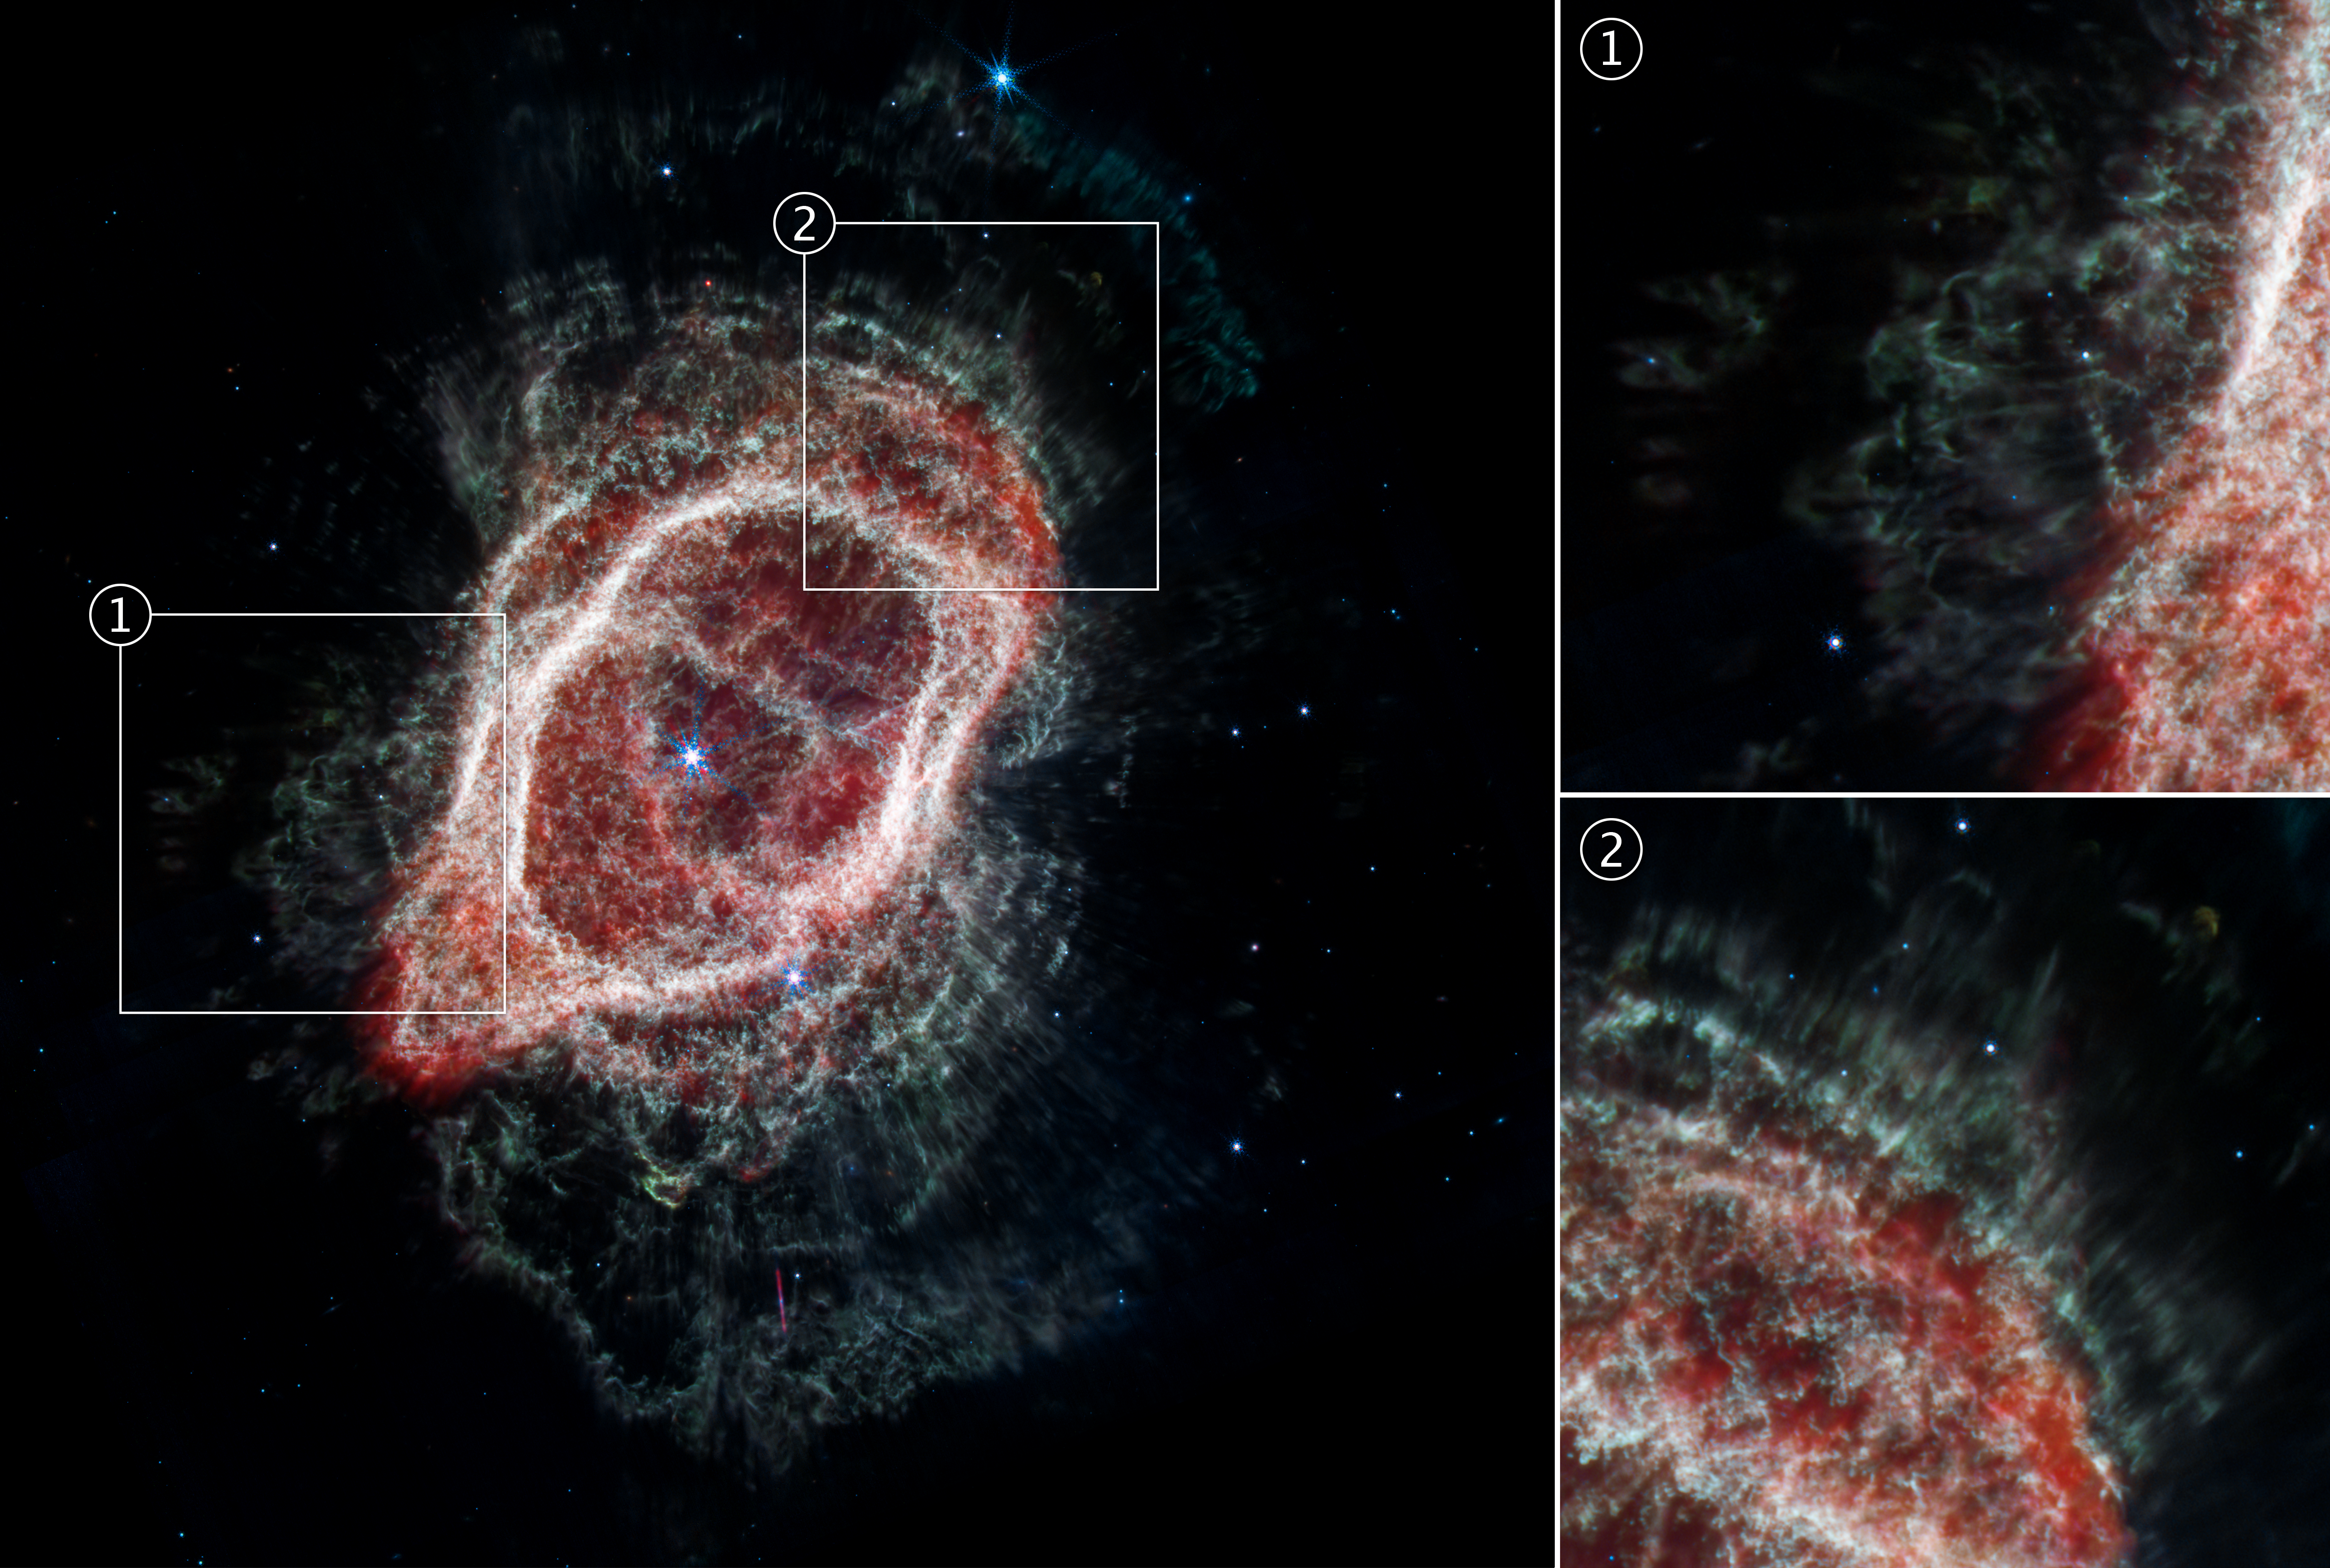

Southern Ring Nebula’s Spokes (NIRCam and MIRI Composite Image)

This is an image of the Southern Ring Nebula (NGC 3132), captured by the NASA/ESA/CSA James Webb Space Telescope’s Near-Infrared Camera (NIRCam) and Mid-Infrared Instrument (MIRI). The image combines near- and mid-infrared light from three filters.

Examine the straight, brightly-lit lines that pierce through the rings of gas and dust around the edges of the Southern Ring Nebula in the Webb Space Telescope’s image. These “spokes” appear to emanate from one or both of the central stars, marking where light streams through holes in the nebula. The holes are evidence of where the dimmer star that created this scene shot out material, creating open pathways for light to flow through.

Some of the star’s ejections followed thin, straight lines (second box) through the gas and dust. Other ejections (first box) look bent, curvy, and thicker. Why? A team of researchers modeled how these complex structures might have formed. Studies of planetary nebulae have shown that even when dying stars eject their gas and dust at all angles simultaneously, the outflowing gas may not stay symmetrical for long. In the Southern Ring Nebula, the team projects that the straight lines may have been shot out hundreds of years earlier and at greater speeds than those that appear thicker and curvy. It’s possible the second set is a mix of material that slowed, creating less linear shapes.

By carefully comparing the appearance and timing of these ejections in the data and simulations, the science team proposes that this is more evidence of the presence of a star with a slightly wider orbit that “stirred the pot” of ejections.

The dimmer star that created the planetary nebula appears as a faint red star next to the central blue star.

Credit: NASA, ESA, CSA, STScI, O. De Marco (Macquarie University), J. DePasquale (STScI)